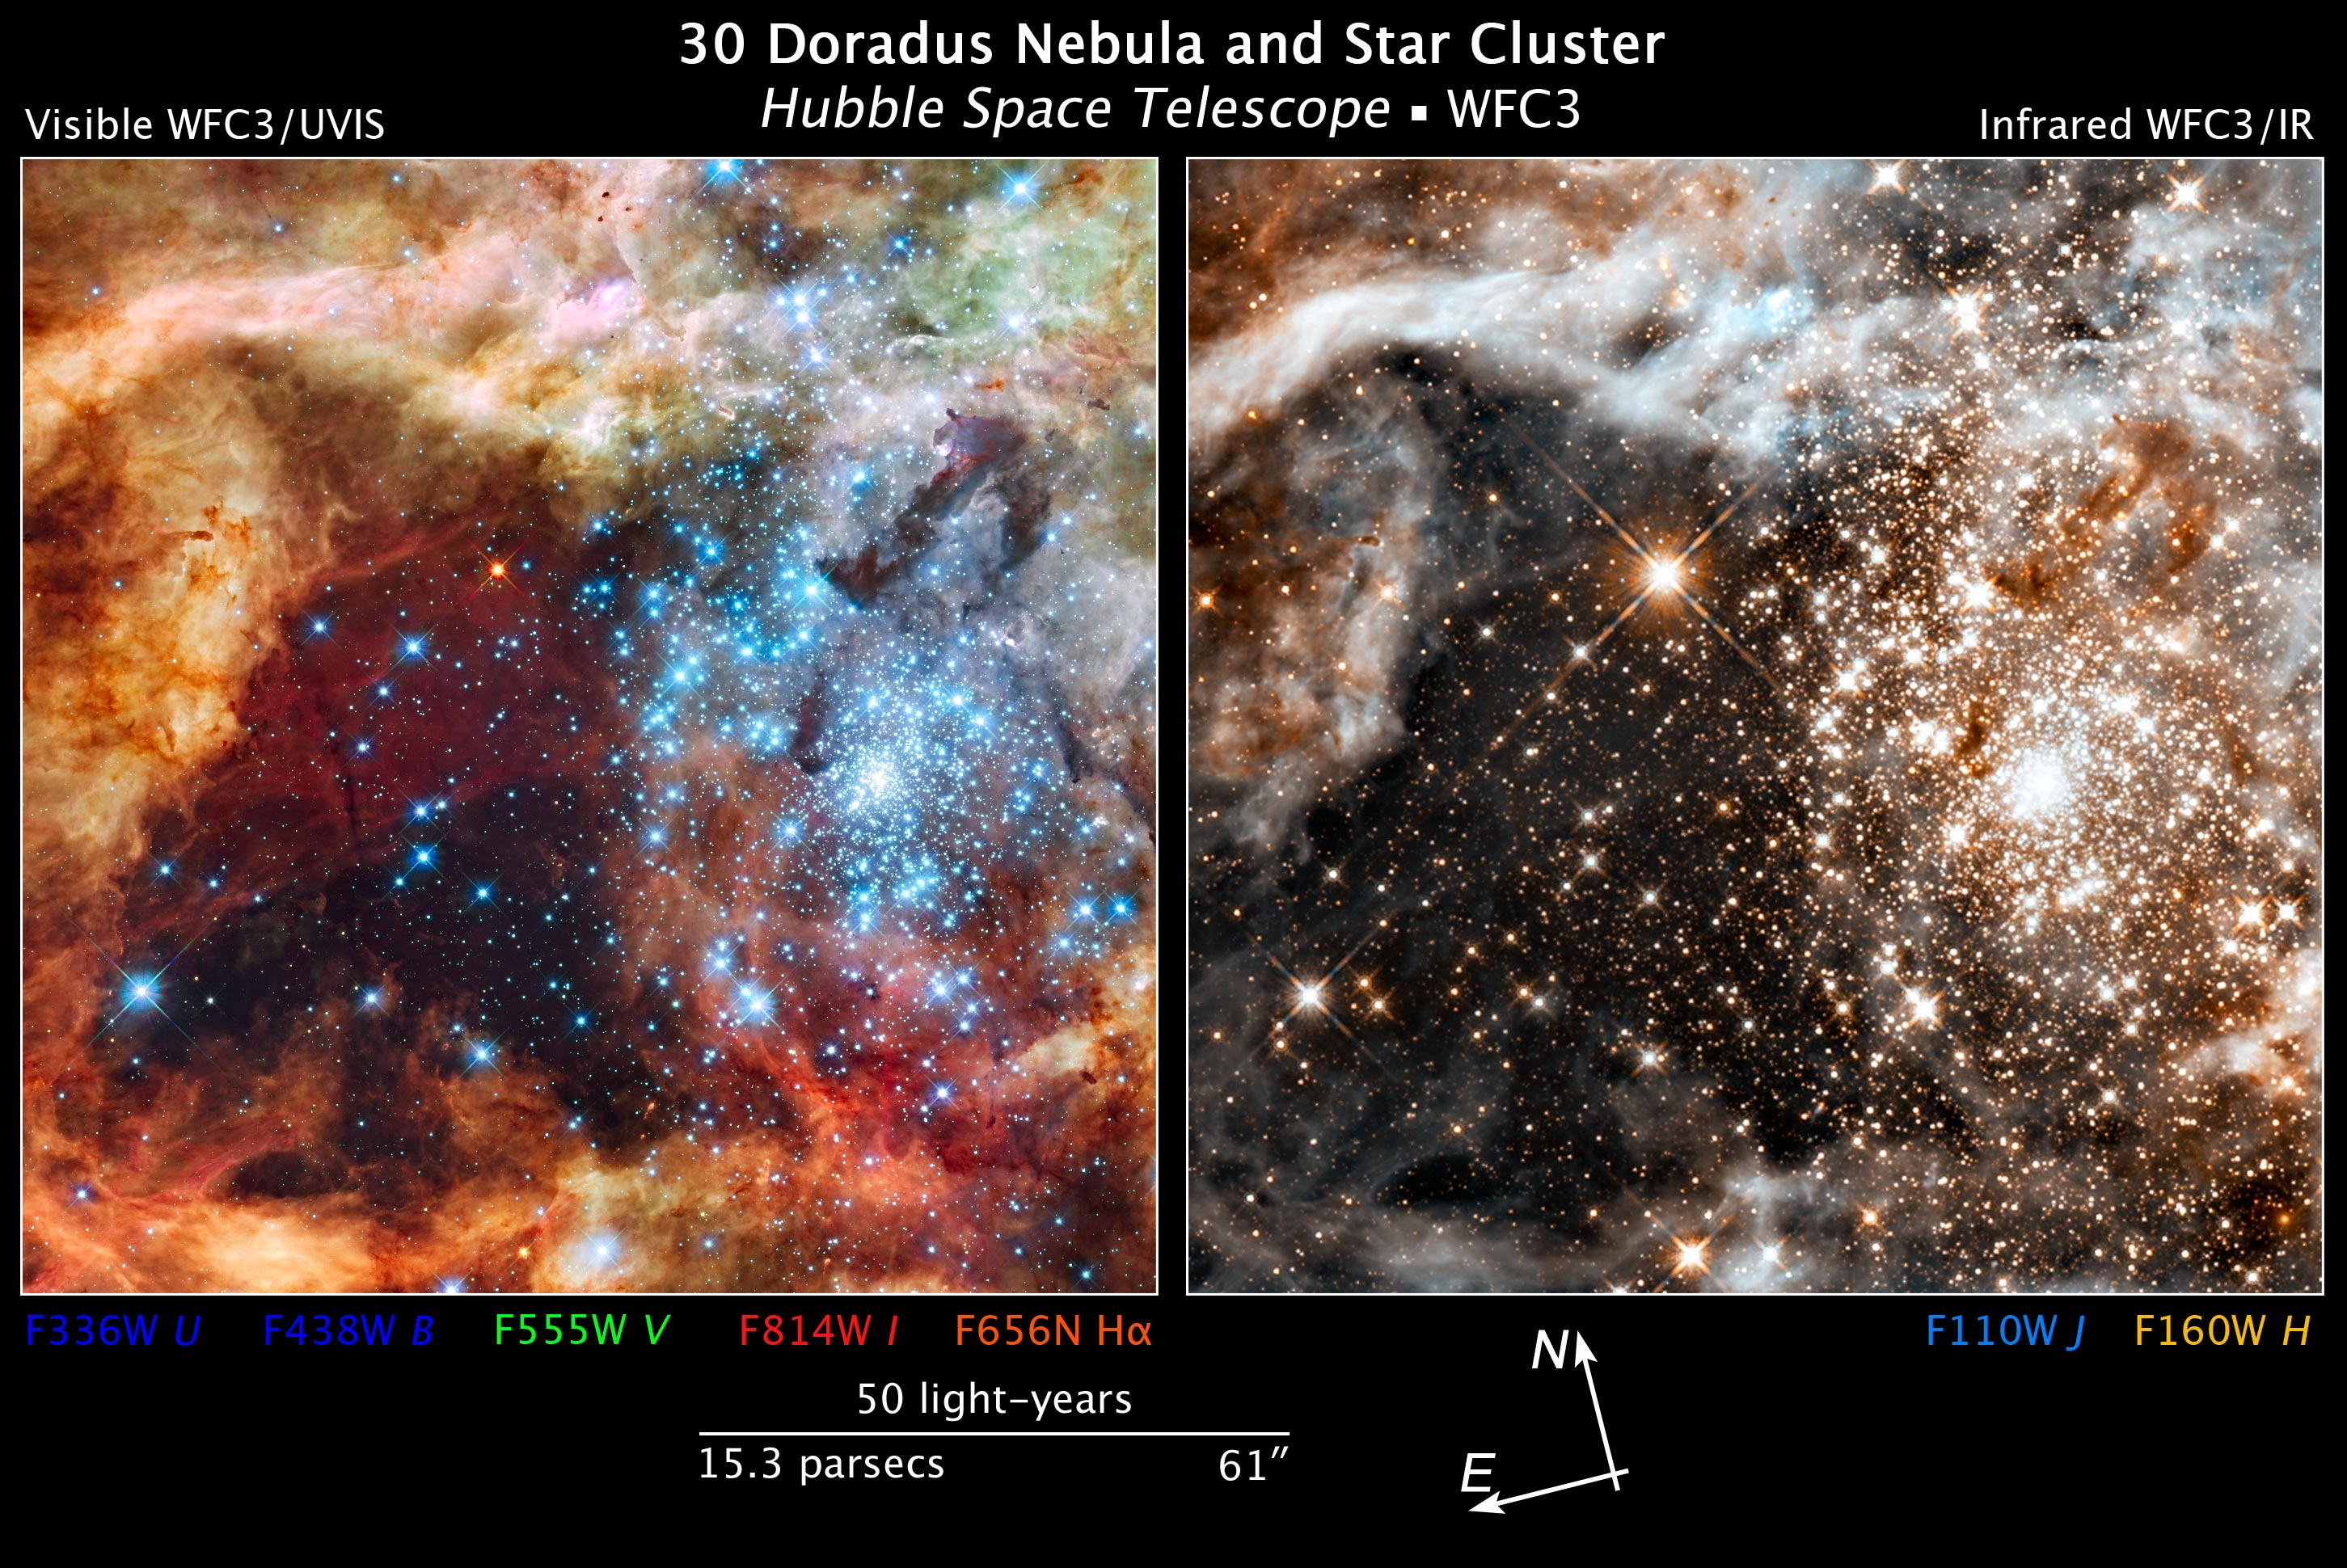

Compass and scale image for 30 Doradus

This image spans about 100 light-years and is the most detailed view of the largest stellar nursery in our local galactic neighborhood. The stellar grouping, called R136, is only a few million years old and resides in the 30 Doradus Nebula, a turbulent star-birth region in the Large Magellanic Cloud (LMC), a satellite galaxy of our Milky Way. There is no known star-forming region in our galaxy as large or as prolific as 30 Doradus. Many of the diamond-like icy blue stars are among the most massive stars known. Several of them are over 100 times more massive than our Sun.

The image on the left is taken in ultraviolet, visible, and red light by Hubble's Wide Field Camera 3 and the right image is solely infrared.

Credit: NASA, ESA, and Z. Levay (STScI)